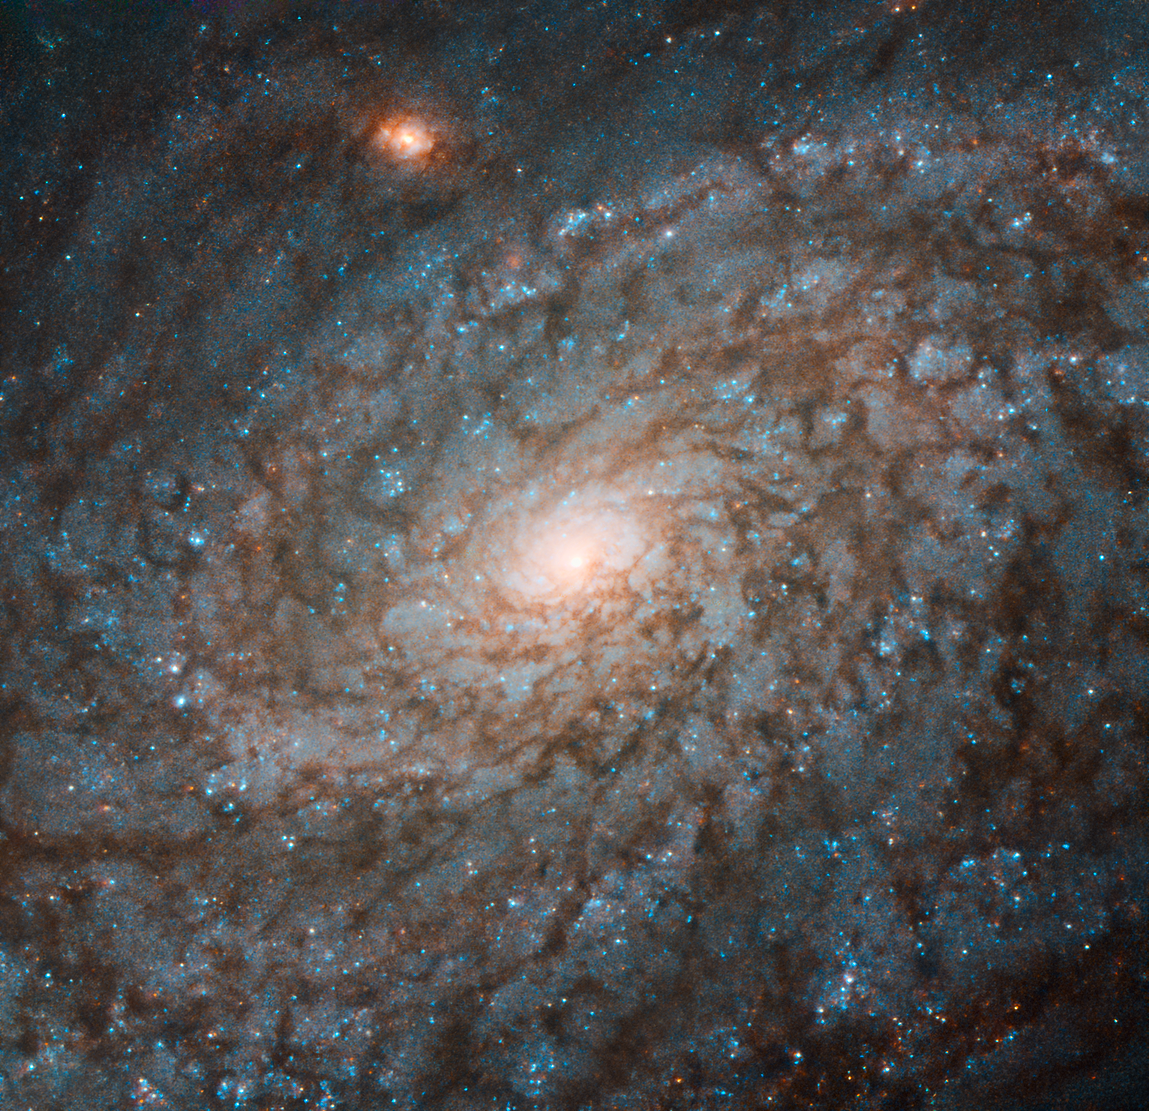

Cotton Wool Galaxy

This Picture of the Week, taken by the NASA/ESA Hubble Space Telescope, shows the galaxy NGC 4237. Located about 60 million light-years from Earth in the constellation of Coma Berenices (Berenice's Hair), NGC 4237 is classified as a flocculent spiral galaxy. This means that its spiral arms are not clearly distinguishable from each other, as in grand design spiral galaxies, but are instead patchy and discontinuous. This gives the galaxy a fluffy appearance, somewhat resembling cotton wool.

Astronomers studying NGC 4237 were actually more interested in its galactic bulge — its bright central region. By learning more about these bulges, we can explore how spiral galaxies have evolved, and study the growth of the supermassive black holes that lurk at the centres of most spirals. There are indications that the mass of the black hole at the centre of a galaxy is related to the mass of its bulge.

However, this connection is still uncertain, and why these two components should be so strongly correlated is still a mystery — one that astronomers hope to solve by studying galaxies in the nearby Universe, such as NGC 4237.

Credit: ESA/Hubble & NASA, P. Erwin et al.